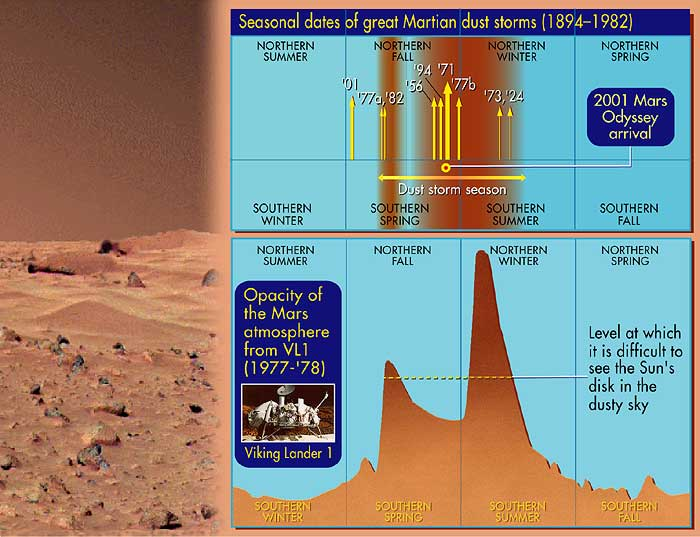

Seasonal dates of great martian dust storms (1894-1982)

This image shows the seasonal dates of great Martian dust storms from 1894 to 1982.

A pair of eagle-eyed spacecraft - the NASA Mars Global Surveyor (MGS) and NASA/ESA Hubble Space Telescope - are giving amazed astronomers a ringside seat to the biggest global dust storm seen on Mars in several decades. The Martian dust storm, larger by far than any seen on Earth, has raised a cloud of dust that has engulfed the entire planet for several months.

Credit: Ann Feild (STScI)